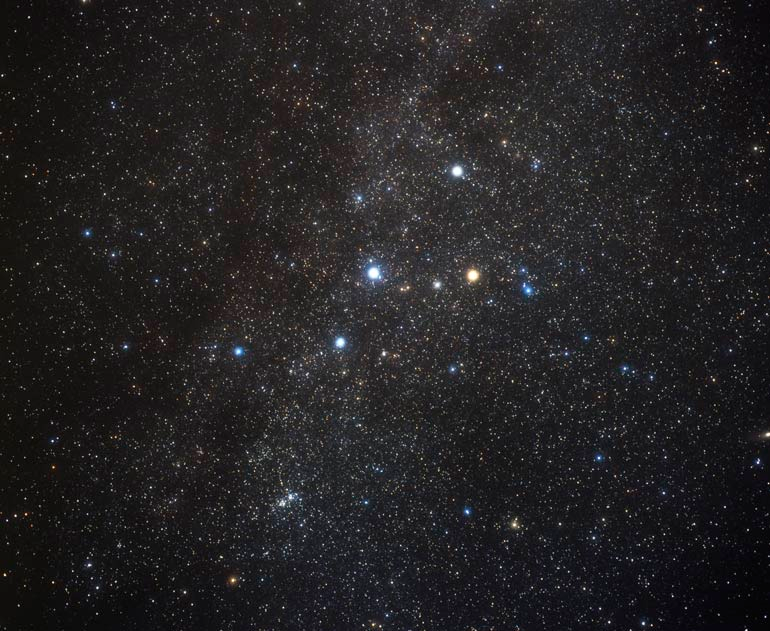

Image of the Constellation Cassiopeia (ground-based image)

This back-yard view of the constellation Cassiopeia was taken by Akira Fujii. The center bar of the Milky Way Galaxy runs through the middle of the constellation and the image.

Credit: A. Fujii